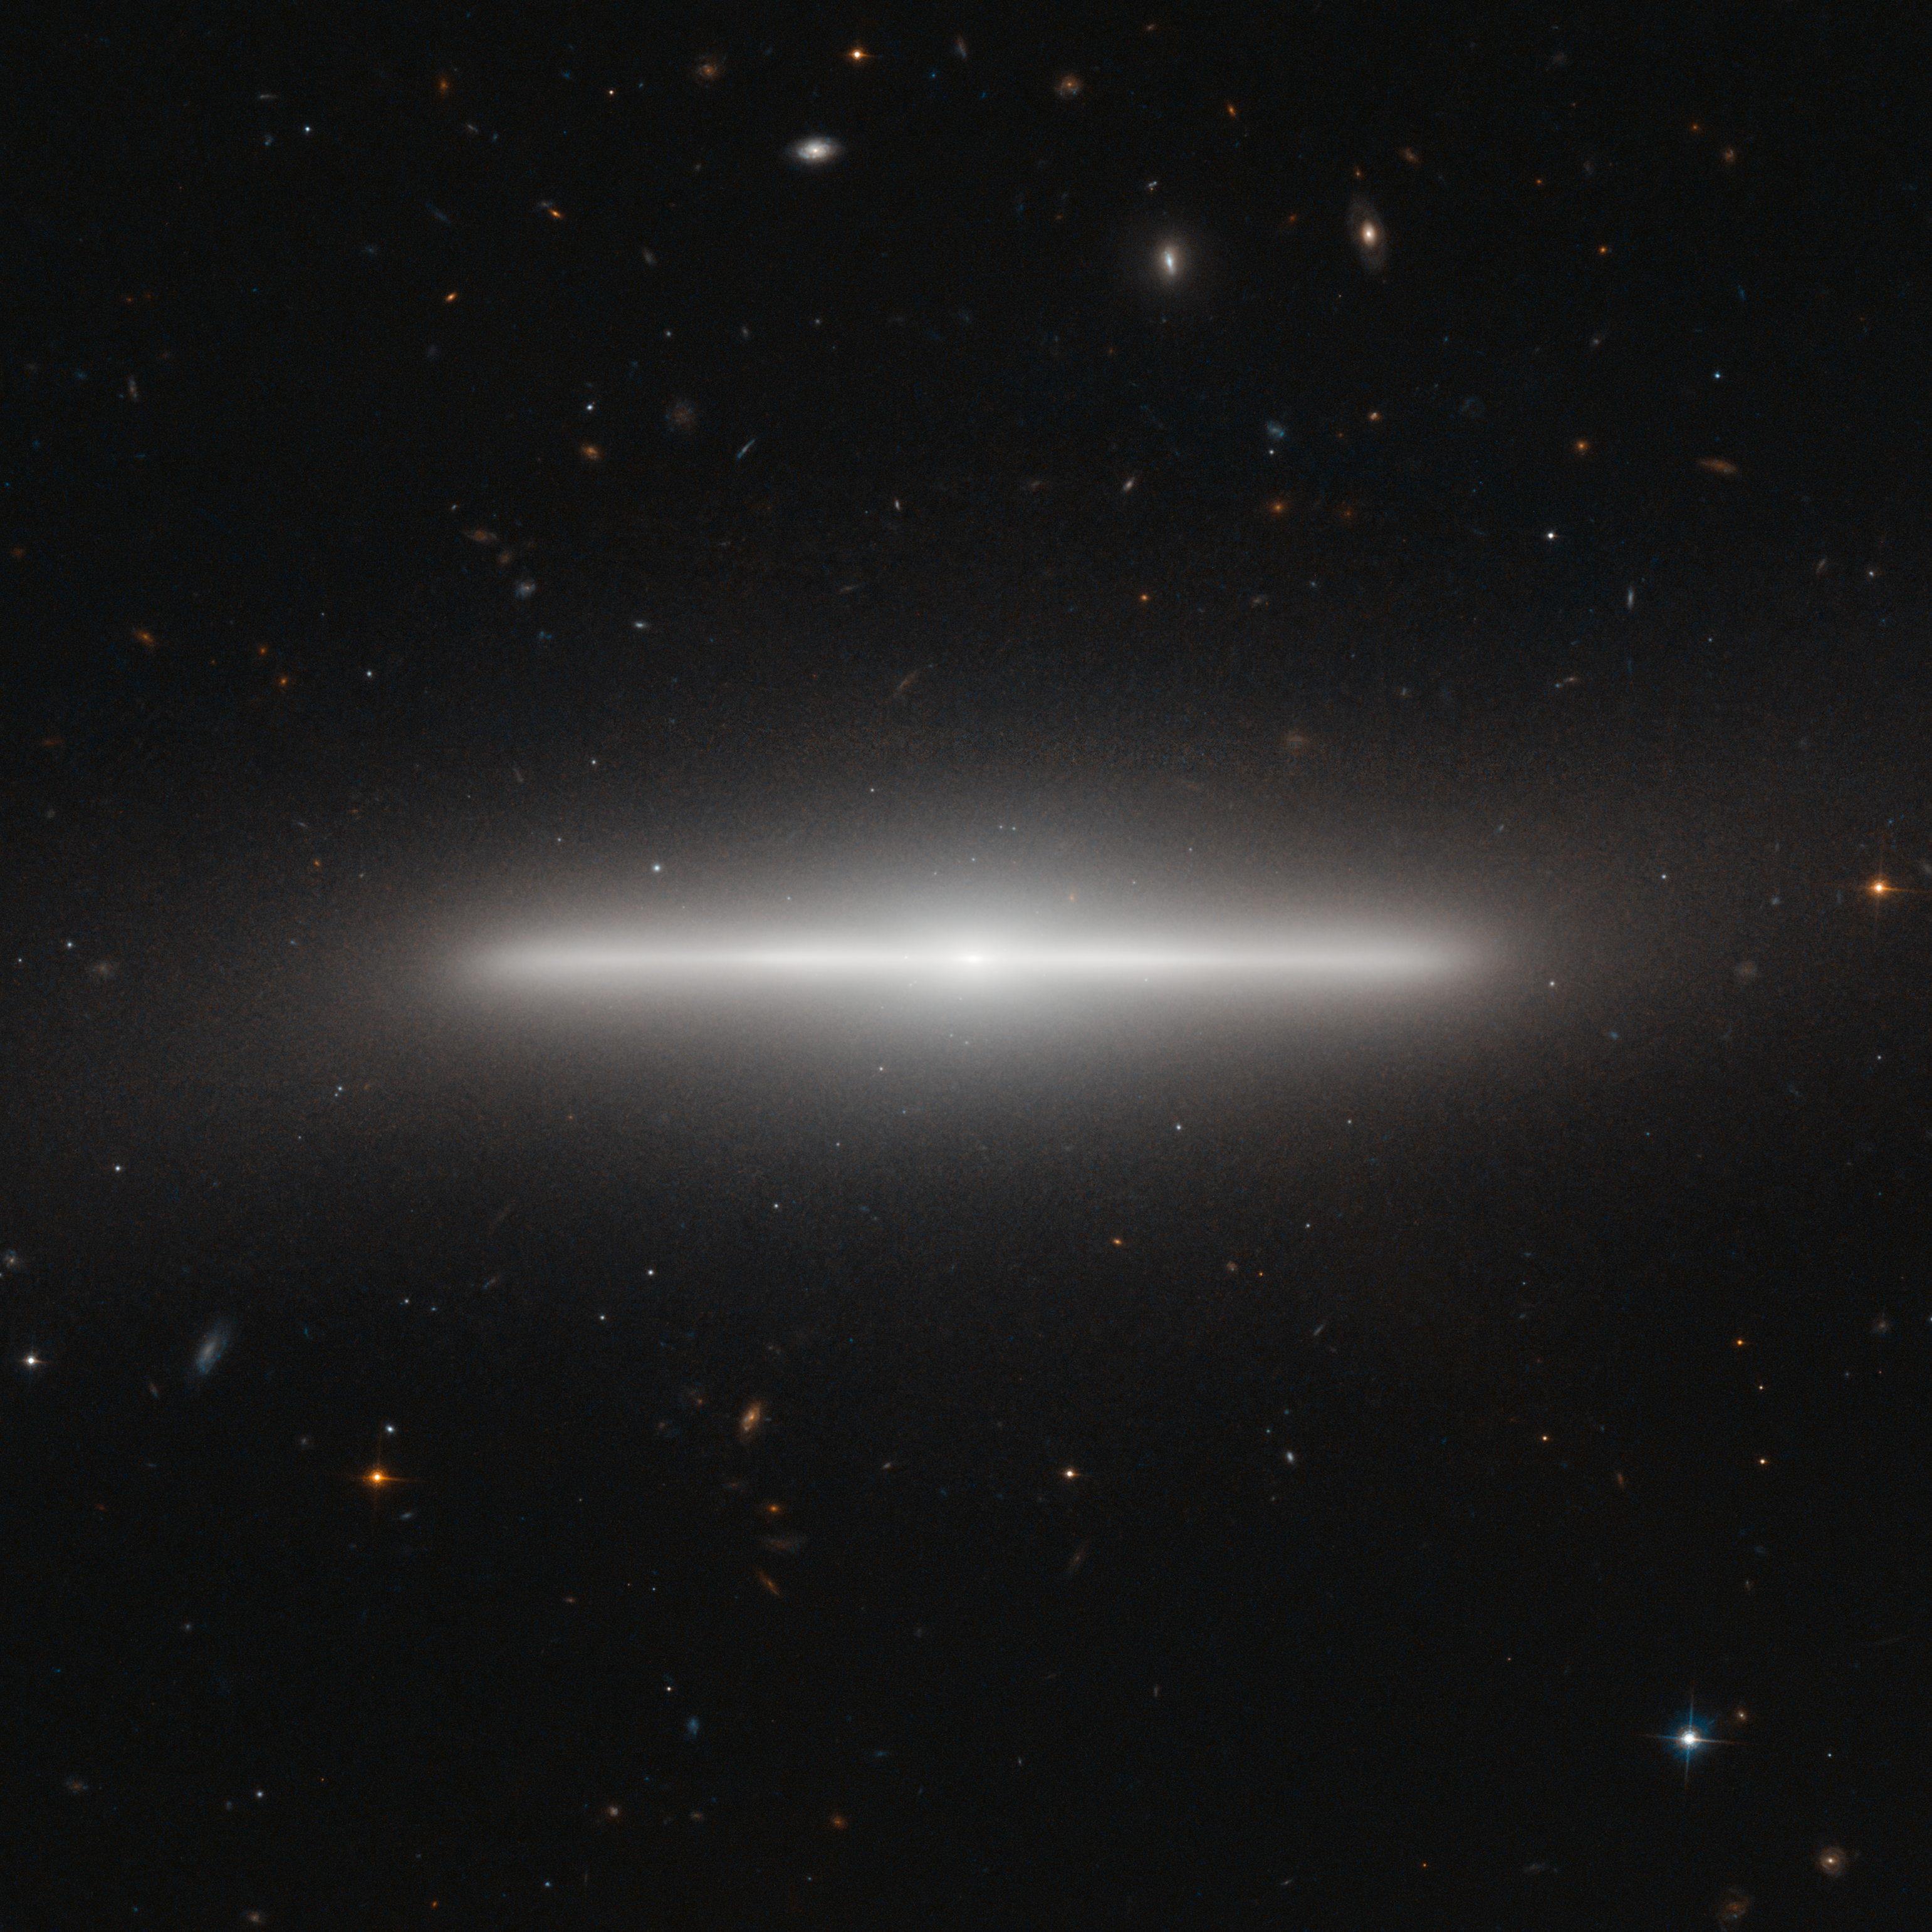

An extraordinarily slender galaxy

The NASA/ESA Hubble Space Telescope has imaged a striking galaxy called NGC 4452, which appears to lie exactly edge-on as seen from Earth. The result is an extraordinary picture of billions of stars observed from an unusual angle. The bright nucleus can be seen at the centre, along with the very thin disc that looks like a straight line from our unusual viewing position. To complete the picture, a hazy halo of stars on the periphery of the galaxy makes it seem to glow.

NGC 4452 was first seen by William Herschel in 1784 with his 47 cm telescope in England. He described the object as a bright nebula, small and very much elongated. The new Hubble image shows just how elongated this unusual object really is.

Galaxies are like star cities, and typically contain many billions of stars. The American astronomer Edwin Hubble, after whom the Hubble Space Telescope is named, was the first person to prove that there are other galaxies beyond our own by measuring their distances. This work, done in the 1920s, forever changed our view of the Universe.

Galaxies also belong to collections that are called galaxy clusters. NGC 4452 is part of the Virgo Cluster, so-called because many of its members appear in the constellation of Virgo (the Maiden). This enormous grouping is approximately 60 million light-years distant and contains around 2000 galaxies.

It is thought that the Local Group of galaxies, to which our own Milky Way belongs, is on the fringes of the Virgo Cluster, and at some point in the far future the Local Group may be pulled slowly into the Virgo Cluster by the force of gravity. Large numbers of much more remote, faint galaxies, far beyond NGC 4452 and the Virgo Cluster, appear in the background of this image.

This picture of NGC 4452 was created from images taken using the Wide Field Channel on Hubble’s Advanced Camera for Surveys. This picture was made from images through blue (F475W, coloured blue) and near-infrared (F850LP, coloured red) filters. The exposures times were 750 s and 1210 s respectively. The field of view extends over 2.6 arcminutes.

Credit: ESA/Hubble & NASA